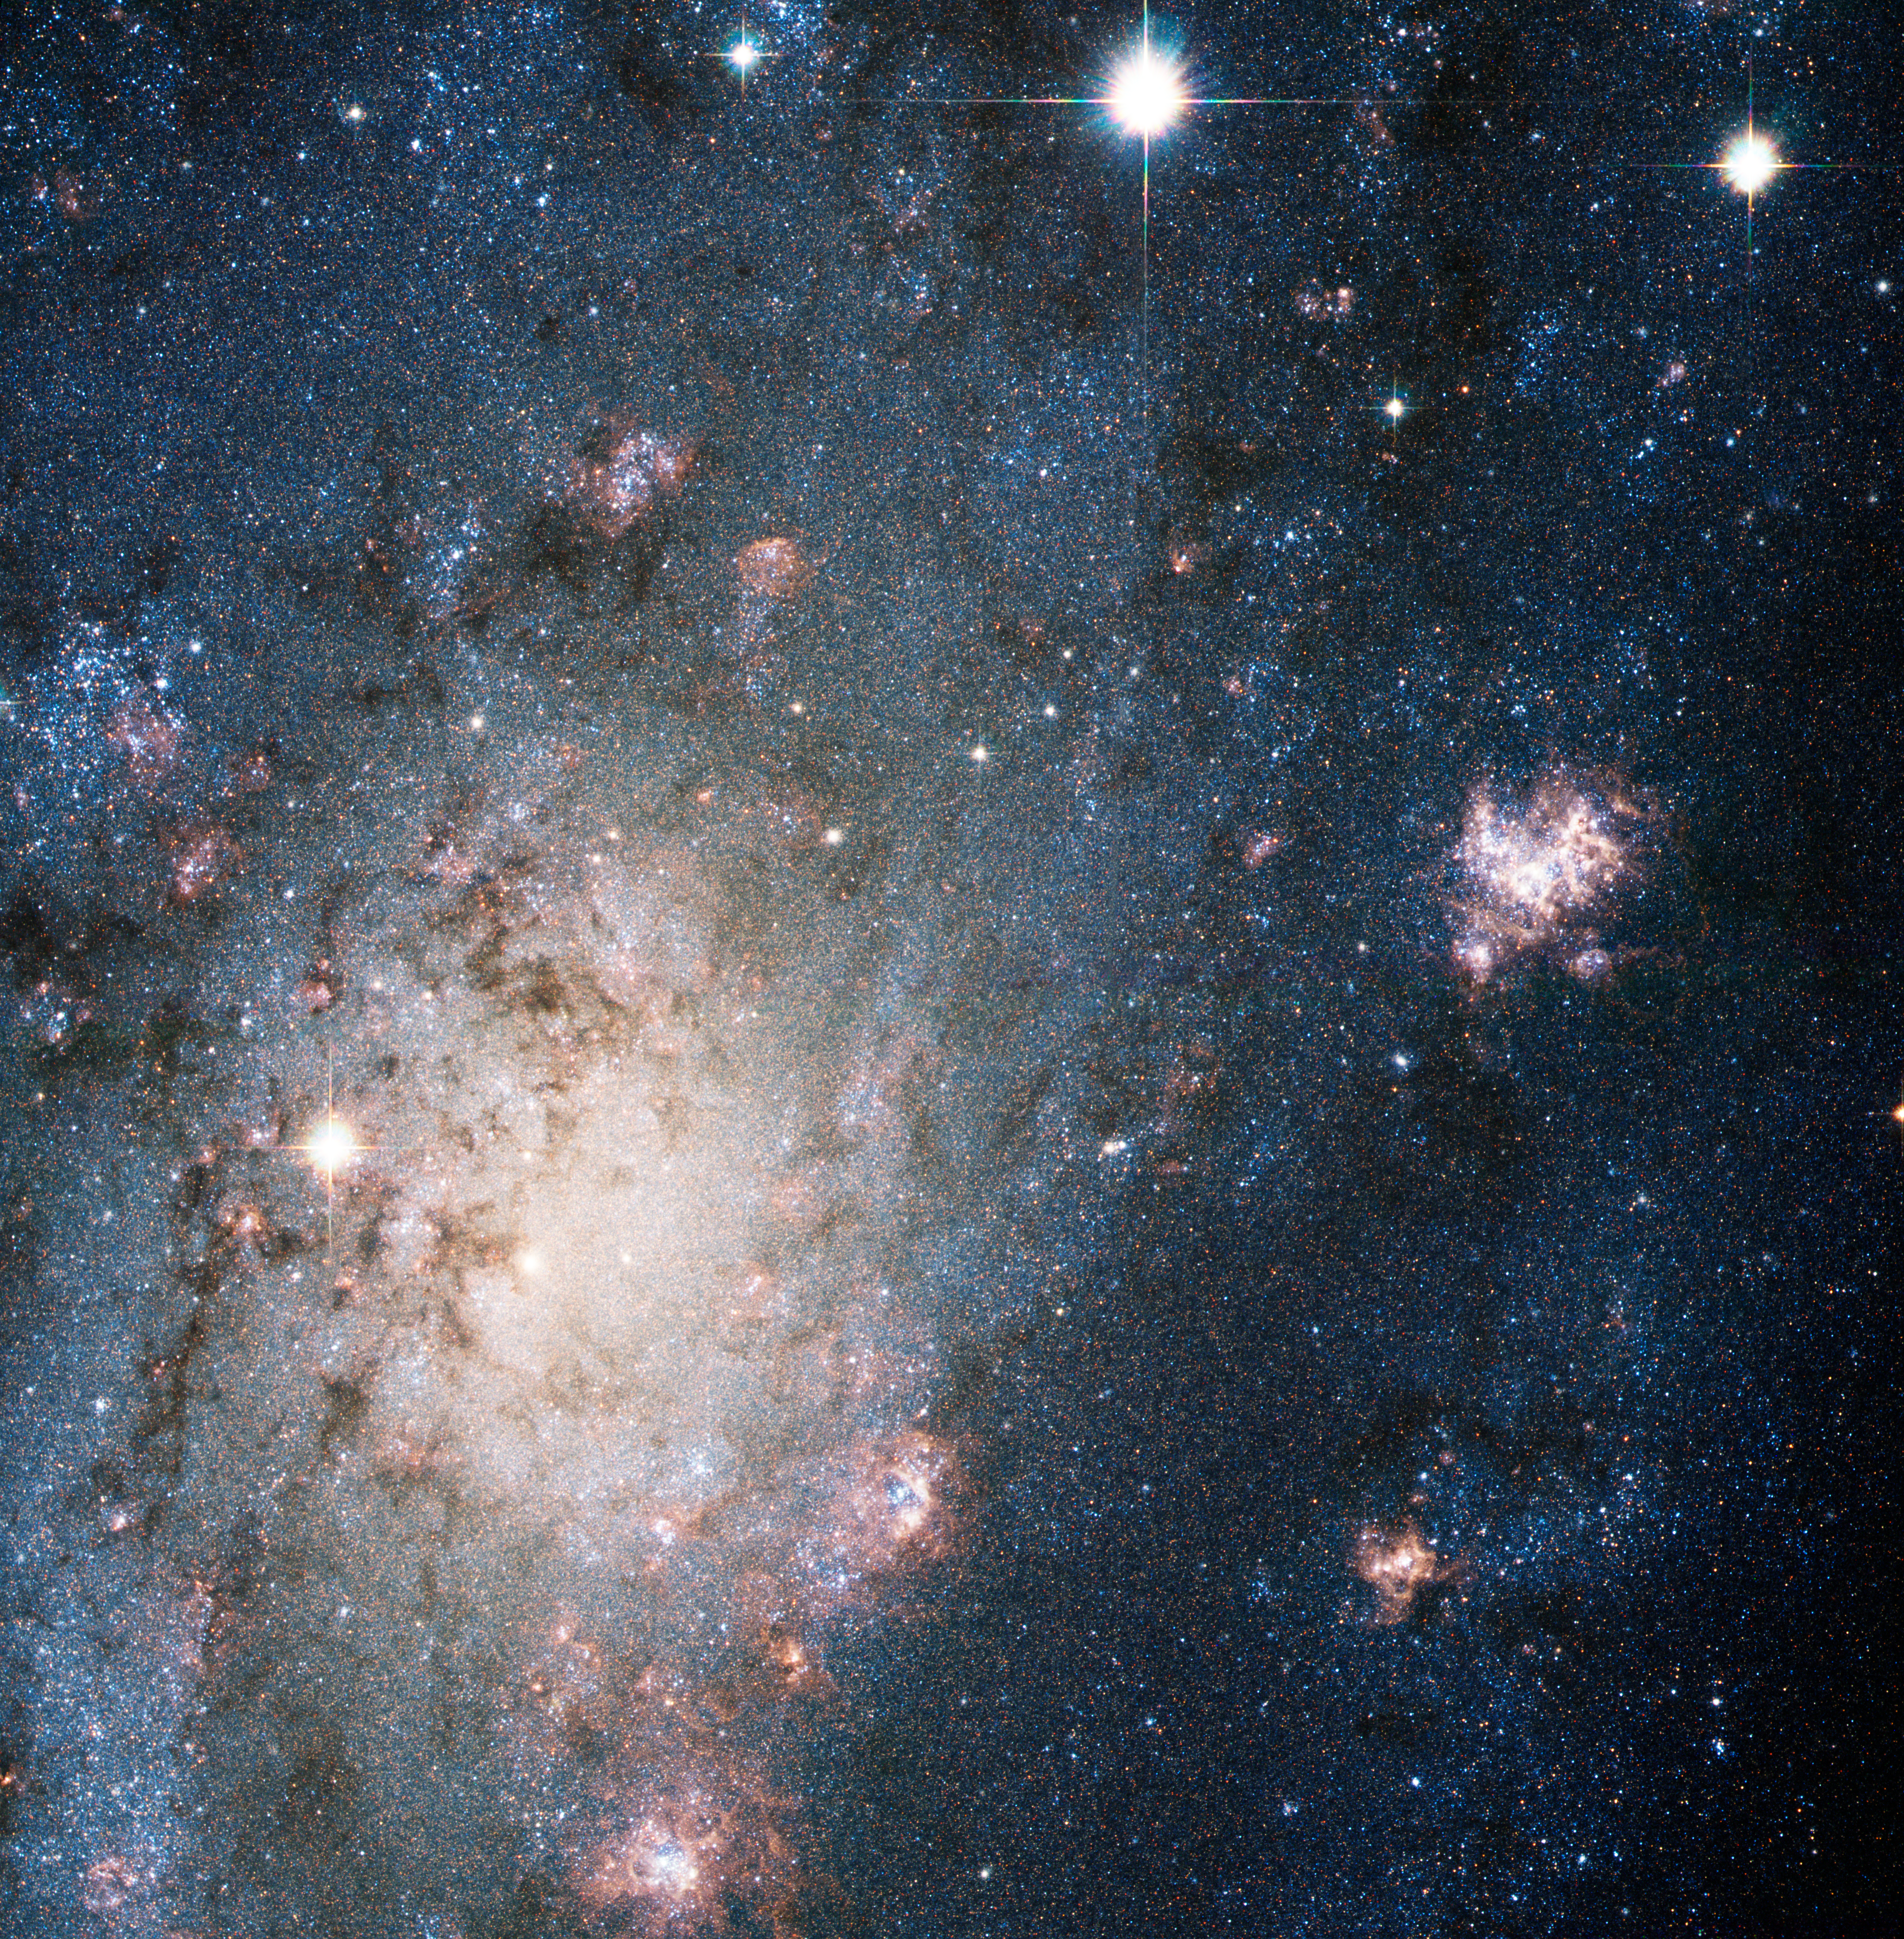

A bright supernova in the nearby galaxy NGC 2403

The explosion of a massive star blazes with the light of 200 million Suns in this NASA/ESA Hubble Space Telescope image. The arrow at top right points to the stellar blast, called a supernova. The supernova is so bright in this image that it easily could be mistaken for a foreground star in our Milky Way Galaxy. And yet, this supernova, called SN 2004dj, resides far beyond our galaxy. Its home is in the outskirts of NGC 2403, a galaxy located 11 million light-years from Earth. Although the supernova is far from Earth, it is the closest stellar explosion discovered in more than a decade.

Credit: NASA, ESA, A.V. Filippenko (University of California, Berkeley), P. Challis (Harvard-Smithsonian Center for Astrophysics), et al.